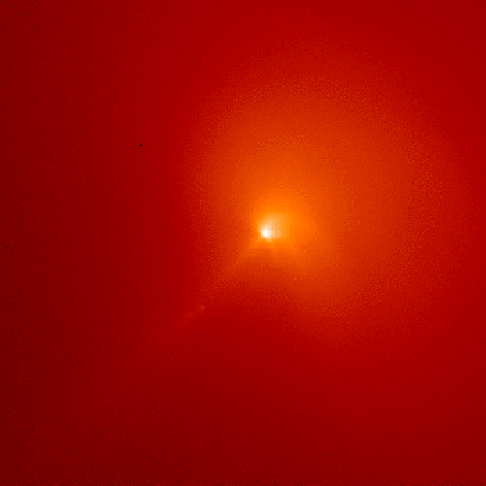

Comet Hyakutake - C/1996 B2

This image, shown in red, was taken through a narrow-band red filter that shows only sunlight scattered by dust particles in the inner coma of the comet.

Credit: M.R. Combi (The University of Michigan)